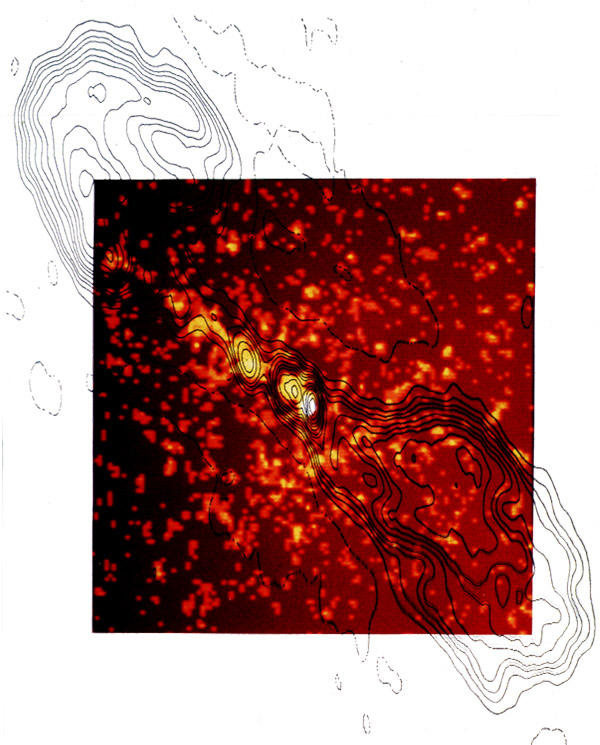

Einstein with radio contours

Einstein Observatory's X-ray images of Centaurus A with superimposed Radio contours.

Credit: E.J. Schreier (STScI), and NASA/ESA